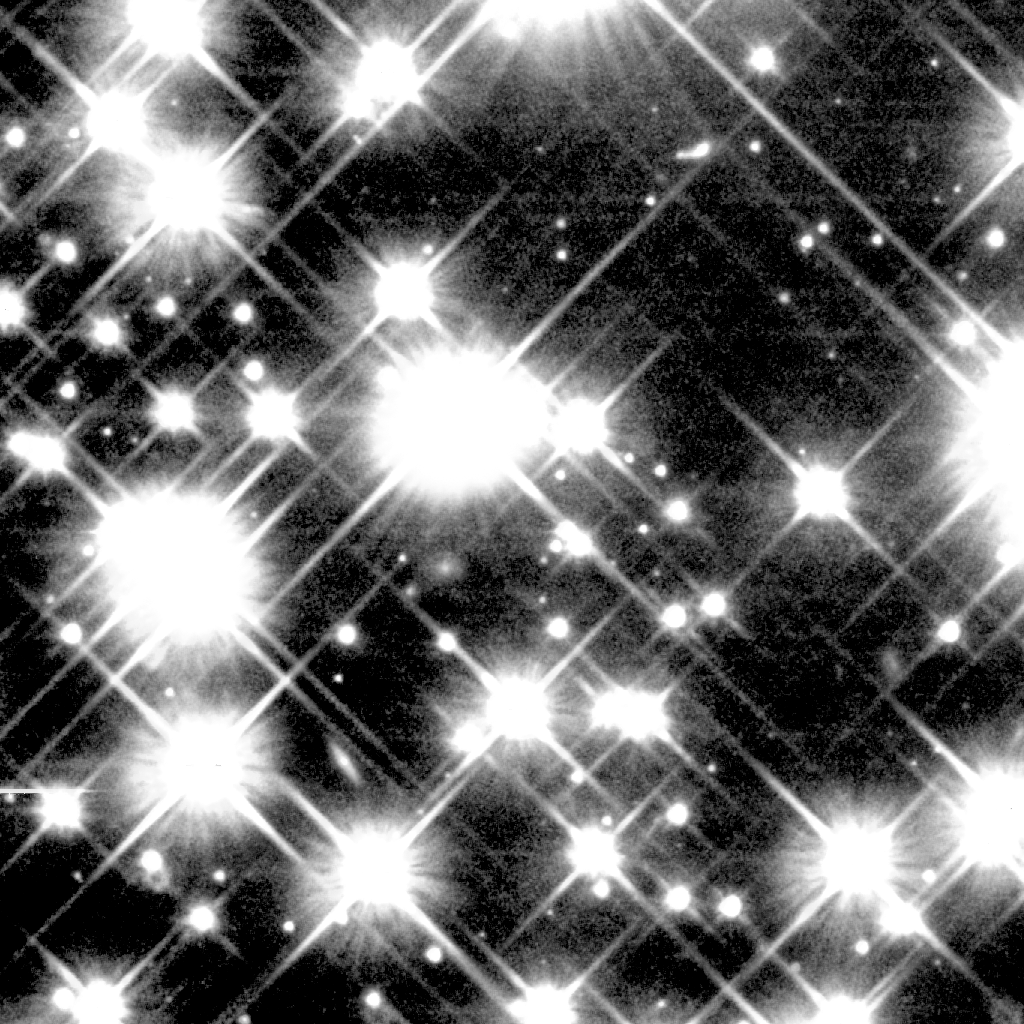

Globular Cluster M4

Peering deep inside a cluster of several hundred thousand stars, the NASA/ESA Hubble Space Telescope uncovered the oldest burned-out stars in our Milky Way Galaxy. Located in the globular cluster M4, these small, dying stars - called white dwarfs - are giving astronomers a fresh reading on one of the biggest questions in astronomy: How old is the universe? The ancient white dwarfs in M4 are about 12 to 13 billion years old. After accounting for the time it took the cluster to form after the big bang, astronomers found that the age of the white dwarfs agrees with previous estimates for the universe's age.

Credit: NASA/ESA and H. Richer